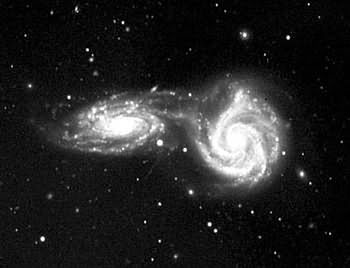

NGC 5426/5427

NGC 5426 and NGC 5427 are a pair of similarly sized interacting spiral galaxies, together also known as Arp 271, 120 million light years away. It is not certain if this interaction they undergo will end in a collision and ultimately in a merging of the two galaxies or if the galaxies will experience just a very close encounter. It is definitly sure that the galaxies are already effecting each other as material was ripped off the galaxies to create a brigde of stars and dust connecting them.

Our Milky Way will undergo a similar collision in the far future with the neighbouring Andromeda galaxy, which is now located about 2.6 million light years away from the Milky Way.

Credit: Vera Rubin (CIW/DTM)